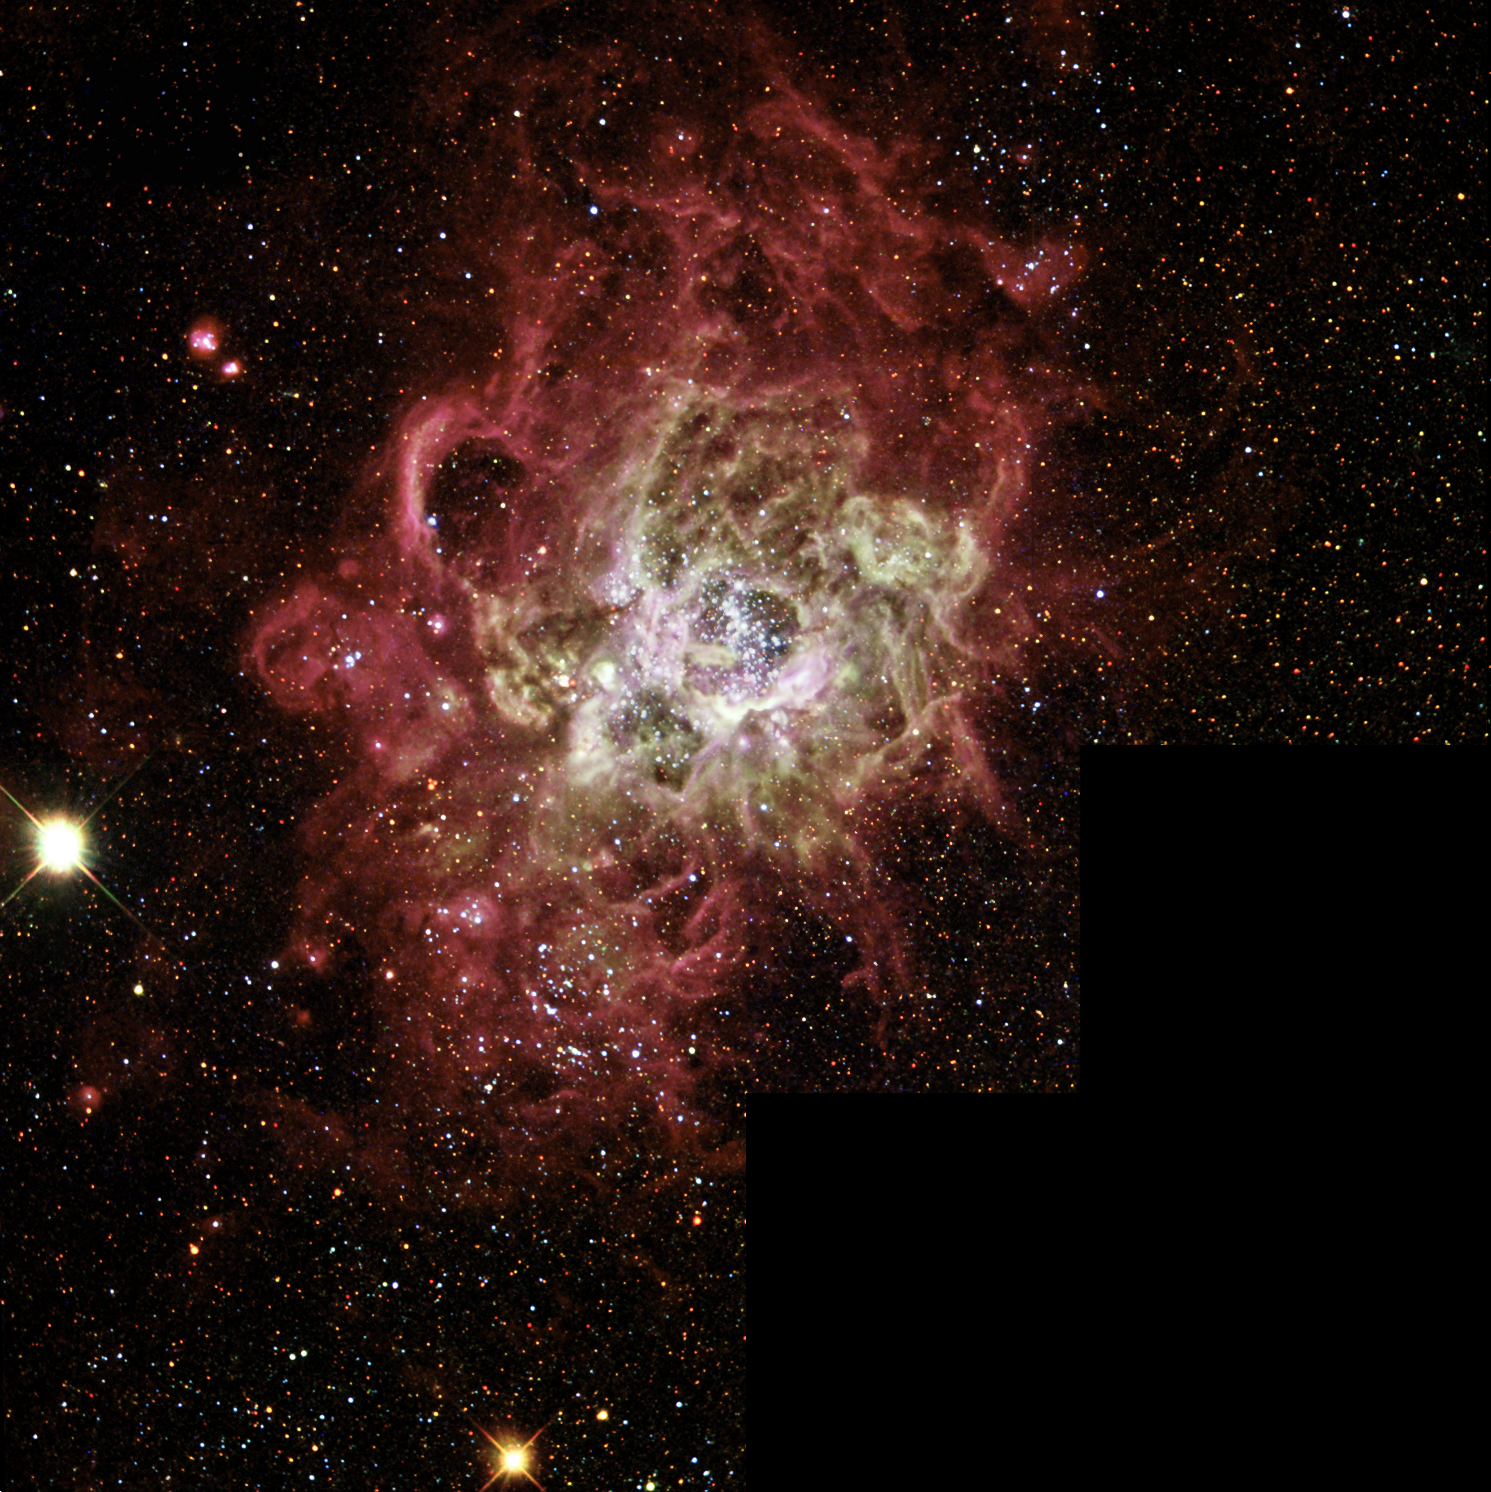

WFPC2 Mosaic of NGC 604 in M33

This full mosaic WFPC2 image shows a slightly larger area around NGC 604. The scale of this image is 2.5 arcminutes along the bottom.

Credit: NASA/ESA and The Hubble Heritage Team (AURA/STScI)